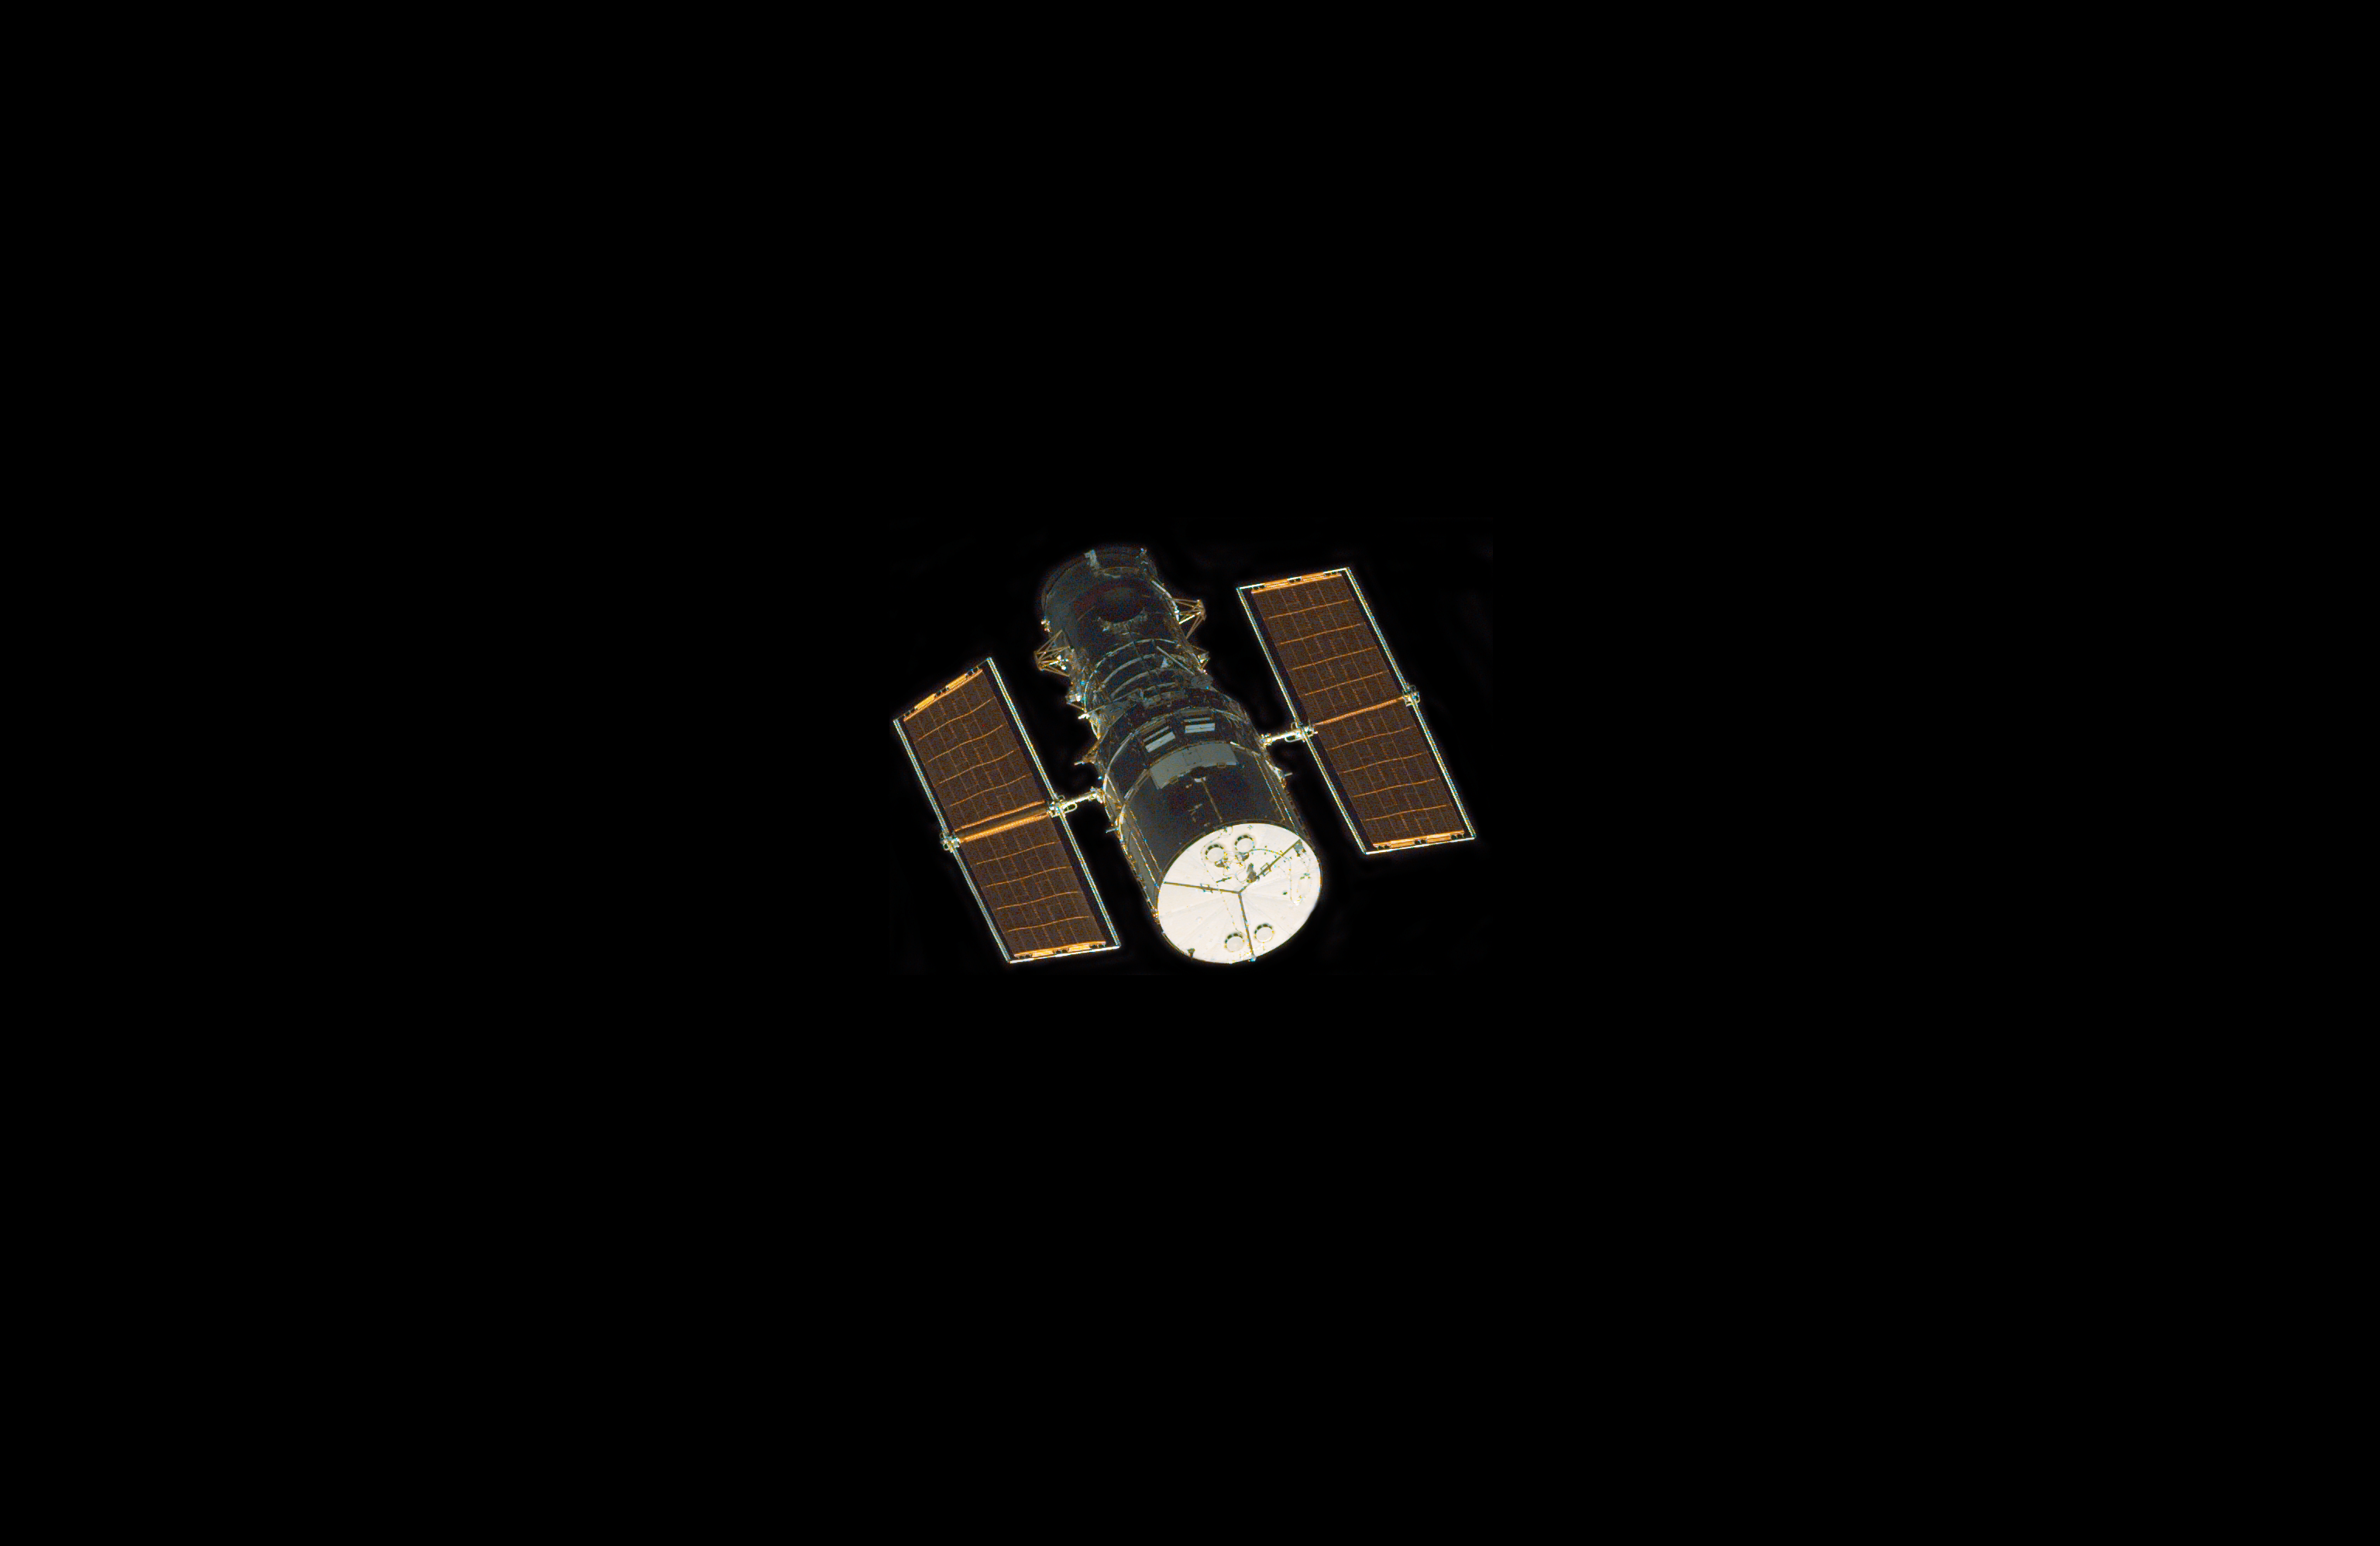

Approaching Hubble

Astronauts aboard the Space Shuttle Discovery recorded this image of the approaching Hubble Space Telescope (HST) with an electronic still camera (ESC).

Credit: NASA/ESA